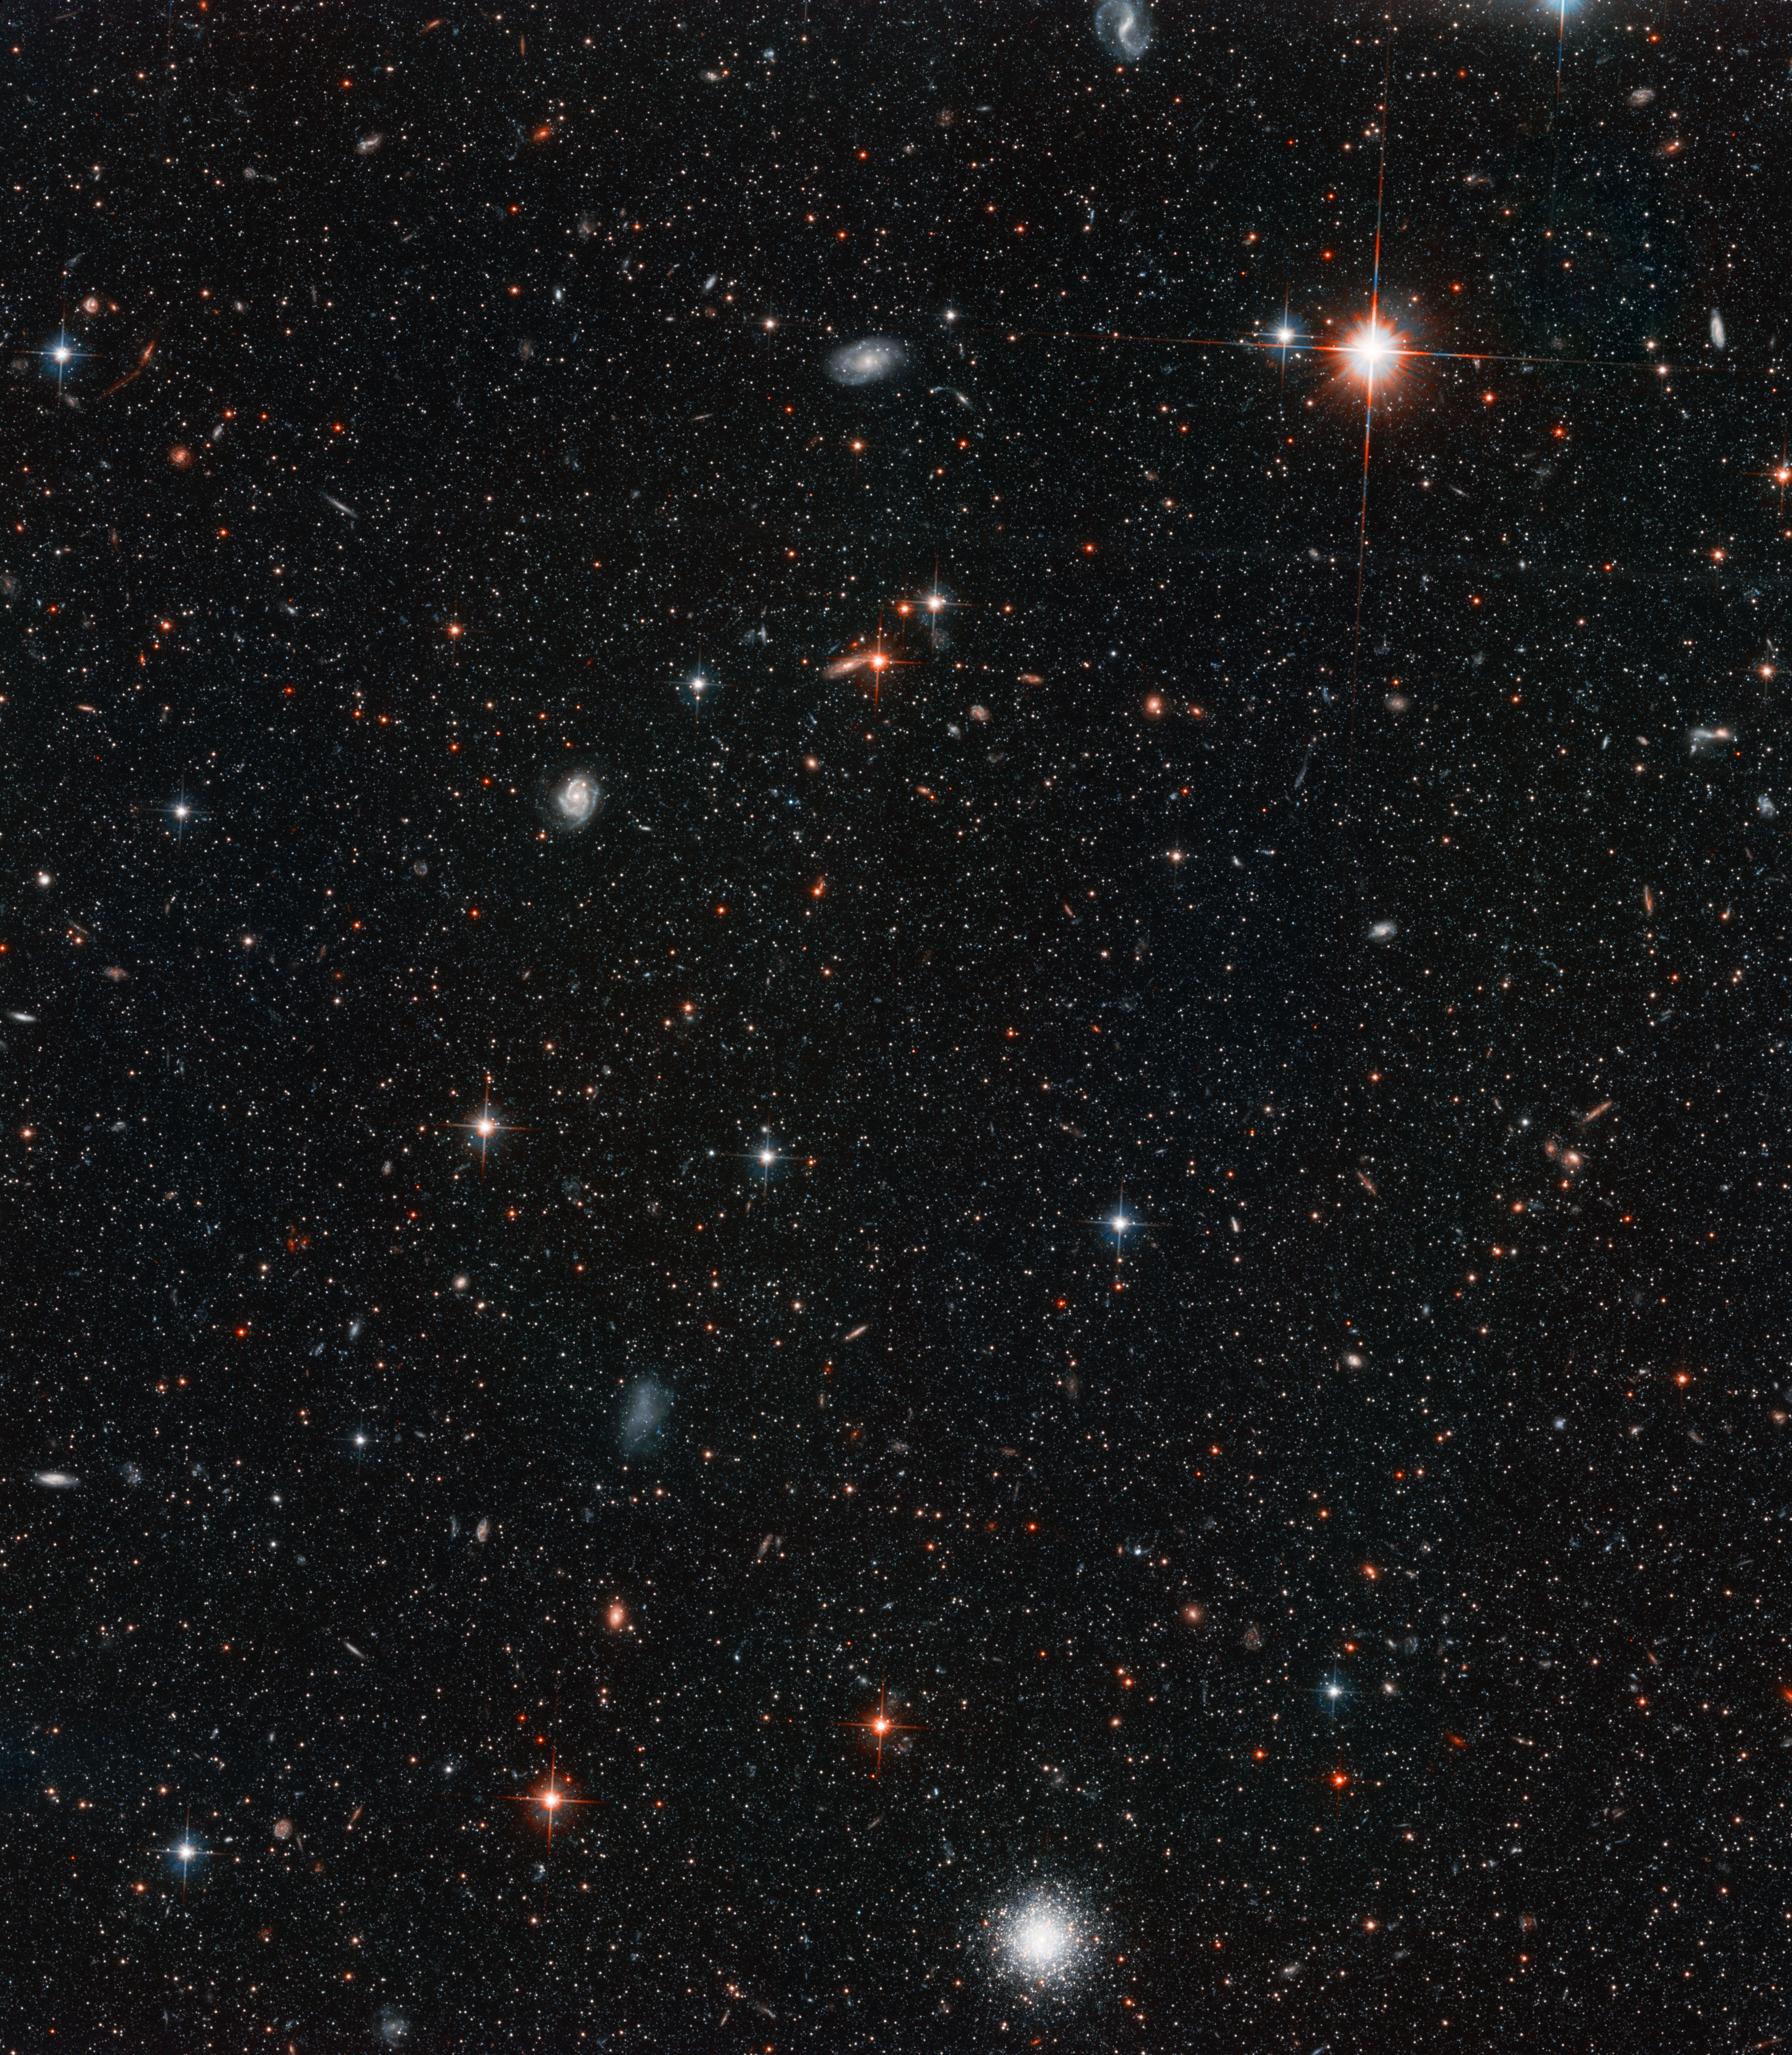

Young and Old Stars Found in Andromeda's Halo

The deepest visible-light image ever taken of the sky resolves approximately 300, 000 stars in the halo of the nearest neighboring spiral galaxy, Andromeda (M31). The photo was taken with the Advanced Camera for Surveys aboard the NASA/ESA Hubble Space Telescope. Because the image captures both faint dwarf stars and bright giant stars, astronomers can estimate the age of the halo population by analyzing its distribution of colour and brightness. The halo is a spherical cloud of stars around Andromeda, located 2.5 million light-years from Earth.

Credit: NASA, ESA and T.M. Brown (STScI)